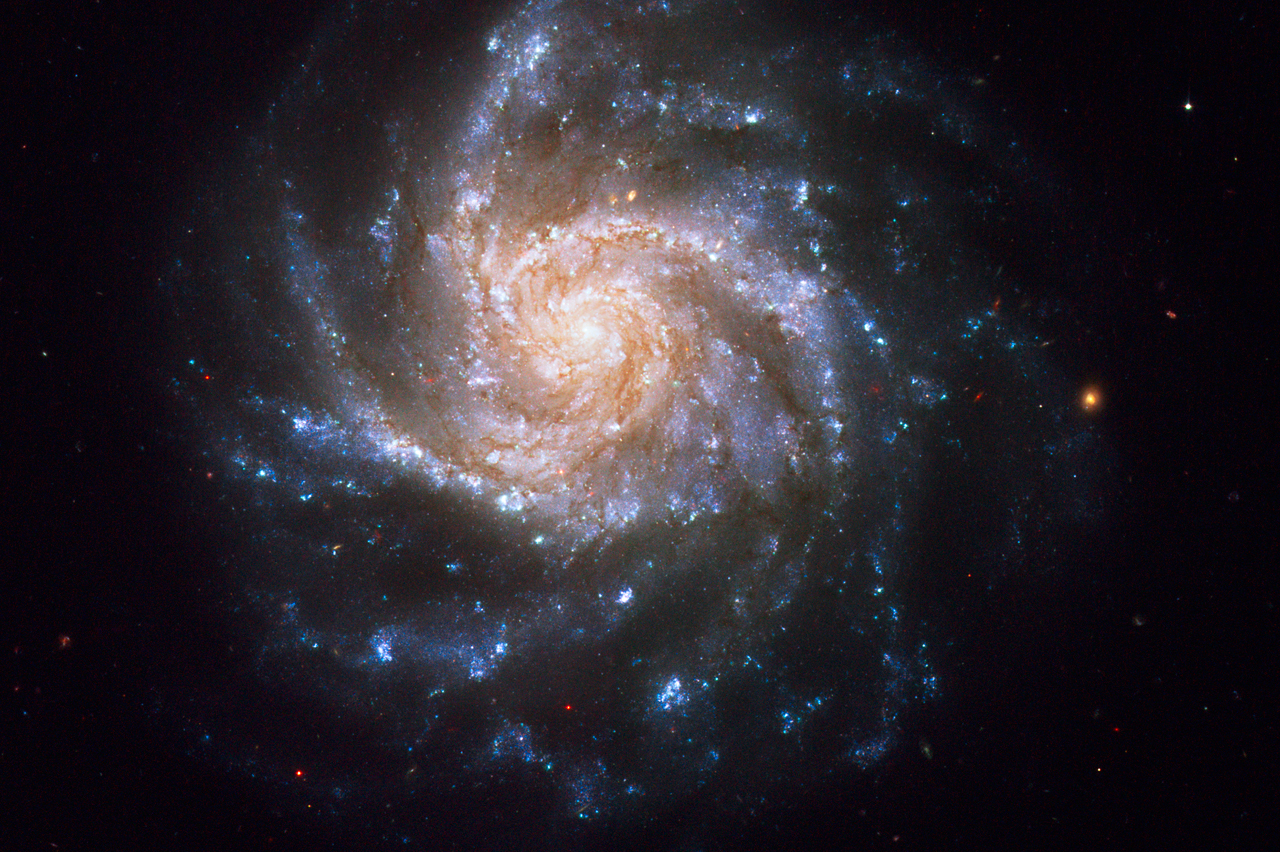

Spiral galaxy NGC 1376

A bluish-white spiral galaxy hangs delicately in the cold vacuum of space. Known as NGC 1376, this snowflake-shaped beauty was observed with the Hubble Space Telescope.

Concentrated along the spiral arms of NGC 1376, bright blue knots of glowing gas highlight areas of active star formation. These regions show an excess of light at ultraviolet (UV) wavelengths because they contain brilliant clusters of hot, newborn stars that are emitting UV light. The less intense, red areas near the core and between the arms consist mainly of older stars. The reddish dust lanes delineate cooler, denser regions where interstellar clouds may collapse to form new stars. Visually intermingled between the spiral arms is a sprinkling of reddish background galaxies.

NGC 1376 resides over 180 million light-years away from Earth in the constellation Eridanus. This galaxy belongs to a class of spirals that are seen nearly face on from our line of sight. Its orientation aids astronomers in studying details and features of the galaxy from a relatively unobscured vantage point. One such feature is represented by stars that vary in brightness over time. In 1990, NGC 1376 was home to a supernova explosion (SN 1990go) that rivaled the brightness of the entire nucleus (as seen from ground-based telescopes) for several weeks.

The story of how this galaxy came to be photographed by Hubble is somewhat unique. During the November 2006 observations of a nearby dwarf galaxy with Hubble's Near Infrared Camera and Multi-Object Spectrometer (NICMOS) detector, careful planning allowed for NGC 1376 to be visible in the field of view of the Advanced Camera for Surveys (ACS) at the same time. Thus, Hubble was able to get two galaxies for the price of one. Although the use of parallel instruments onboard Hubble is not uncommon, capturing two interesting targets is rather rare.

Initial ground-based observations of NGC 1376 and its nearby dwarf companion implied that the two might be interacting with each other, but the Hubble observations demonstrates no obvious signs of interaction. This is not surprising since the dwarf galaxy would have little effect on this giant spiral galaxy. NGC 1376 was imaged with ACS in eight filters ranging from blue to visible to infrared light. Four of the filtered images that show the most colour separation were used in this Hubble composite of NGC 1376.

Credit: NASA, ESA, and the Hubble Heritage Team (STScI/AURA). Acknowledgment: R. Thompson (University of Arizona)